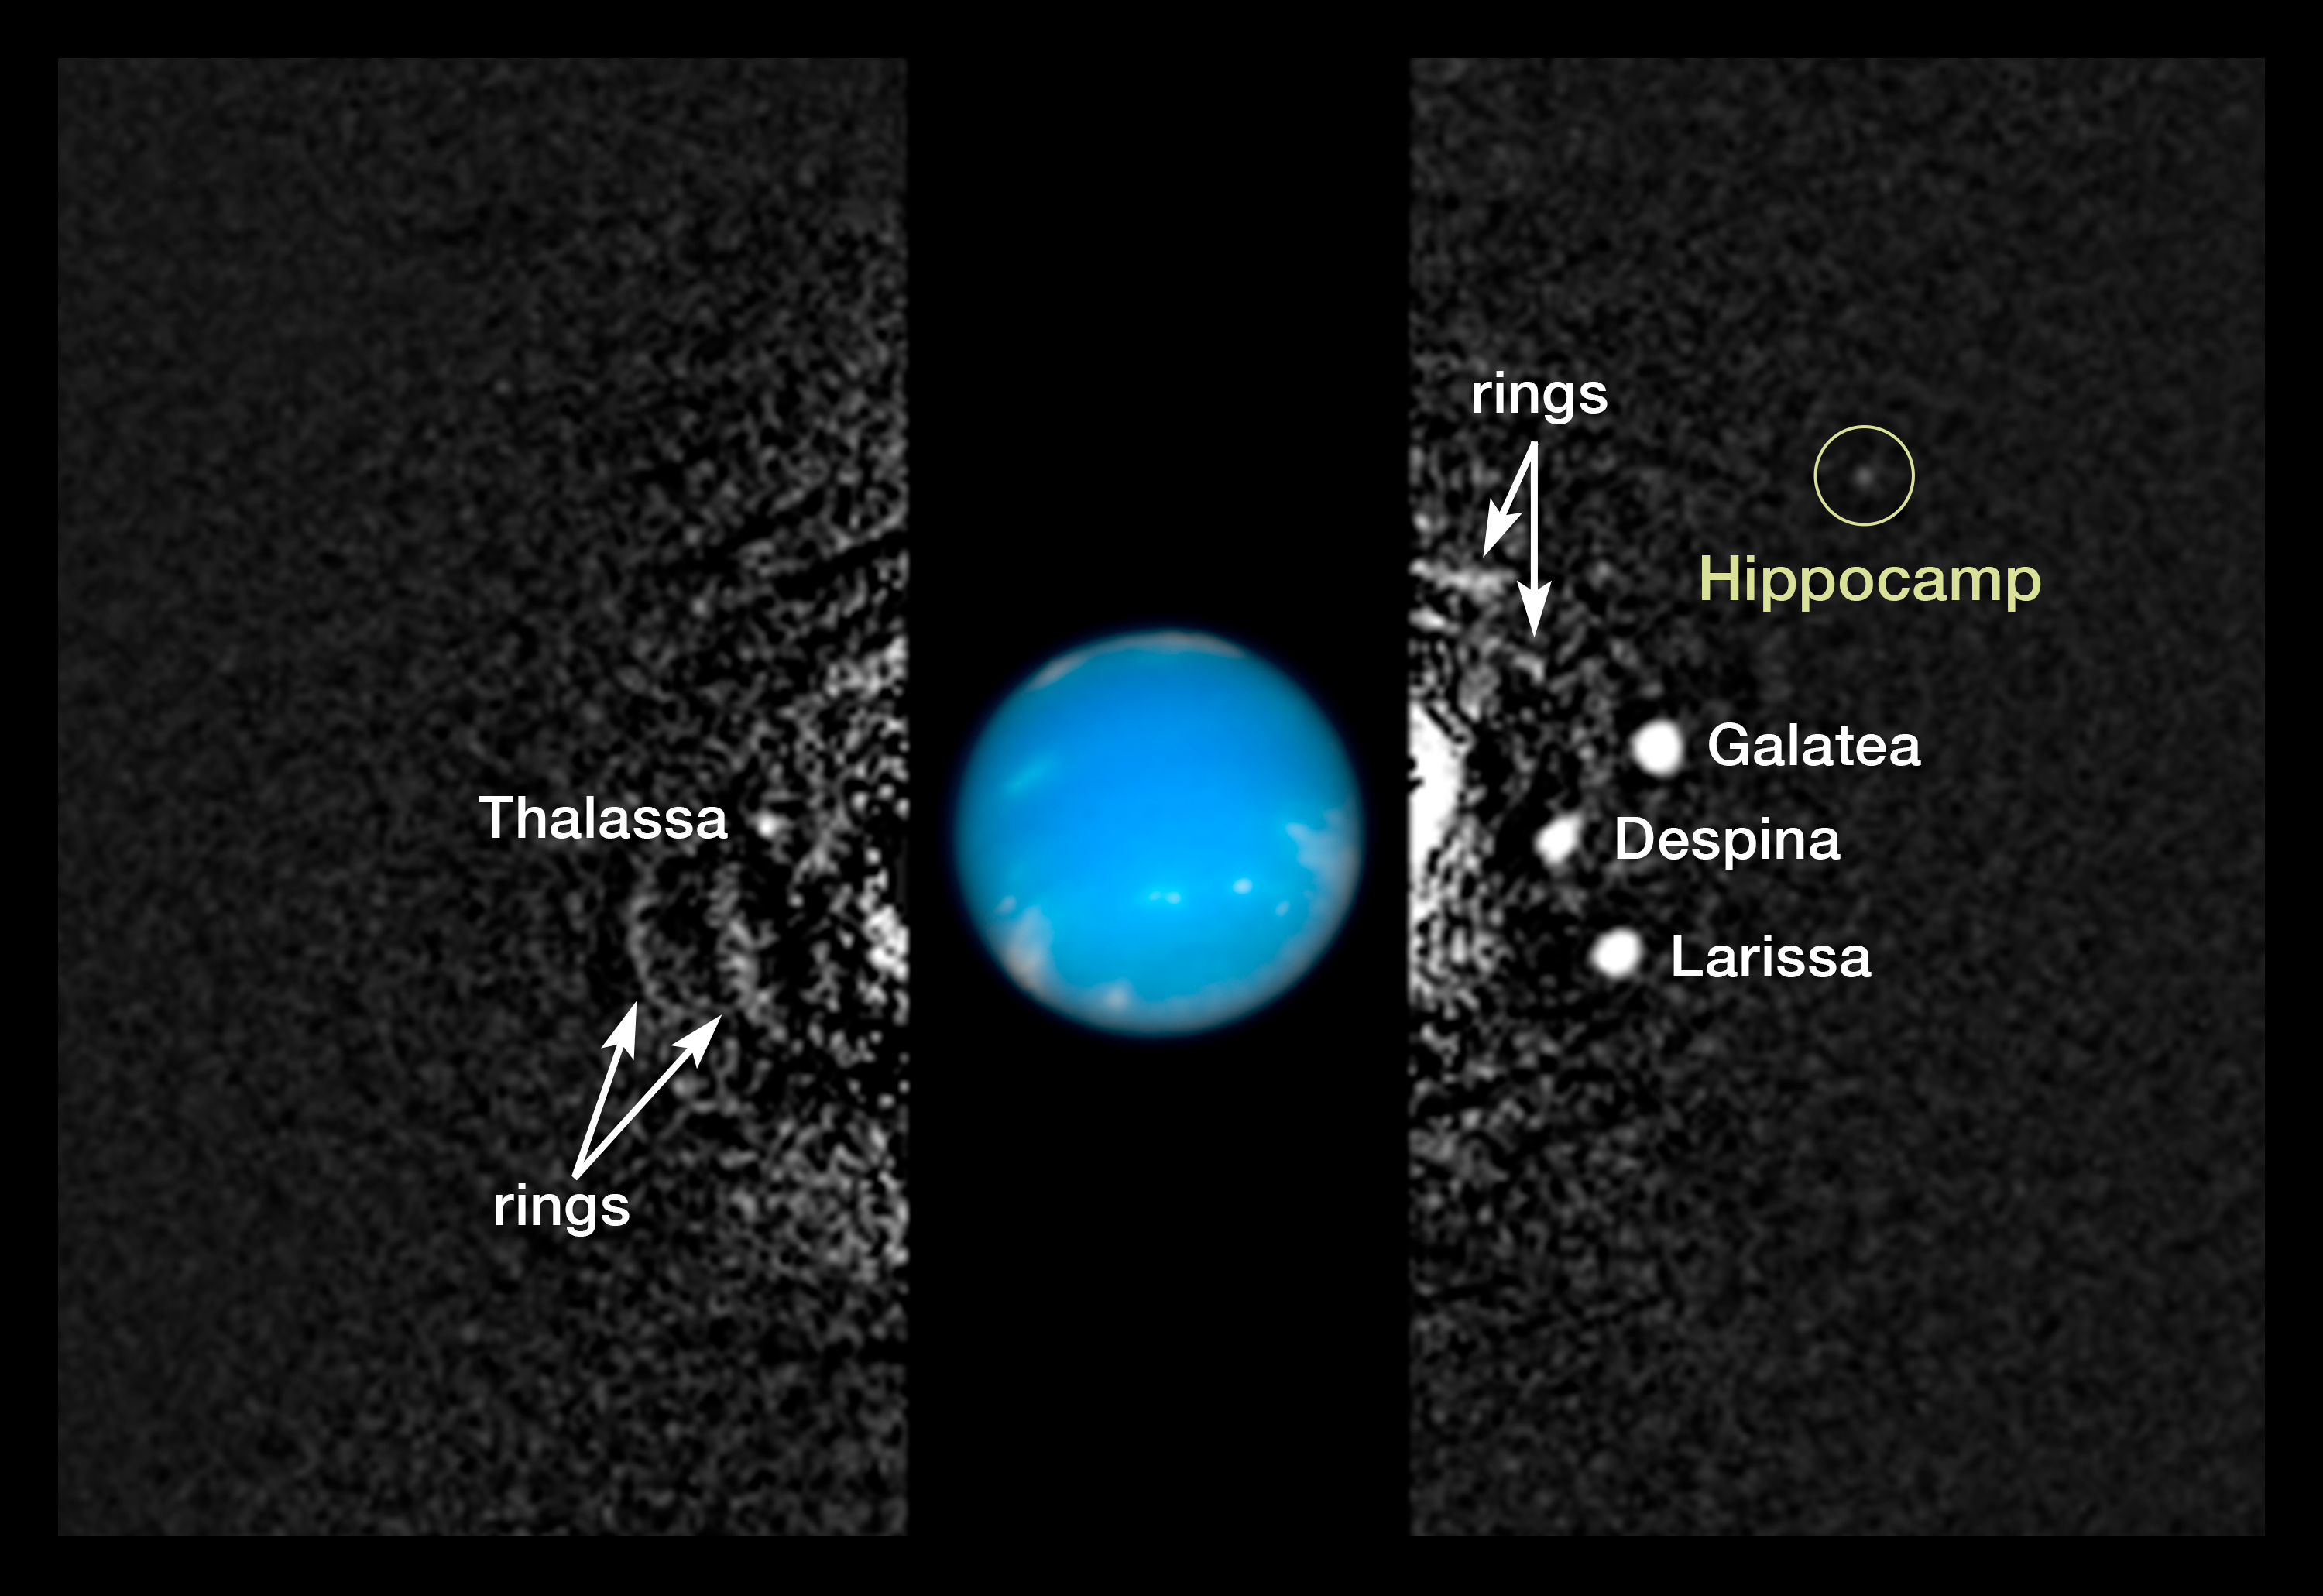

Hubble data showing Neptune’s inner moons

This composite image shows the location of Neptune’s moon Hippocamp, formerly known just as S/2004 N 1, orbiting the giant planet Neptune, about 4.8 billion kilometres from Earth.

The moon is only about 34 kilometres in diameter and dim, and was therefore missed by NASA's Voyager 2 spacecraft cameras when the probe flew by Neptune in 1989. Several other moons that were discovered by Voyager appear in this 2009 image, along with a circumplanetary structure known as ring arcs.

Mark Showalter of the SETI Institute discovered Hippocamp in July 2013 when analysing over 150 archival images of Neptune taken by Hubble from 2004 to 2009.

The black-and-white image was taken in 2009 with Hubble's Wide Field Camera 3 in visible light. Hubble took the colour inset of Neptune on August 19, 2009.

Credit: NASA, ESA, and M. Showalter (SETI Institute)